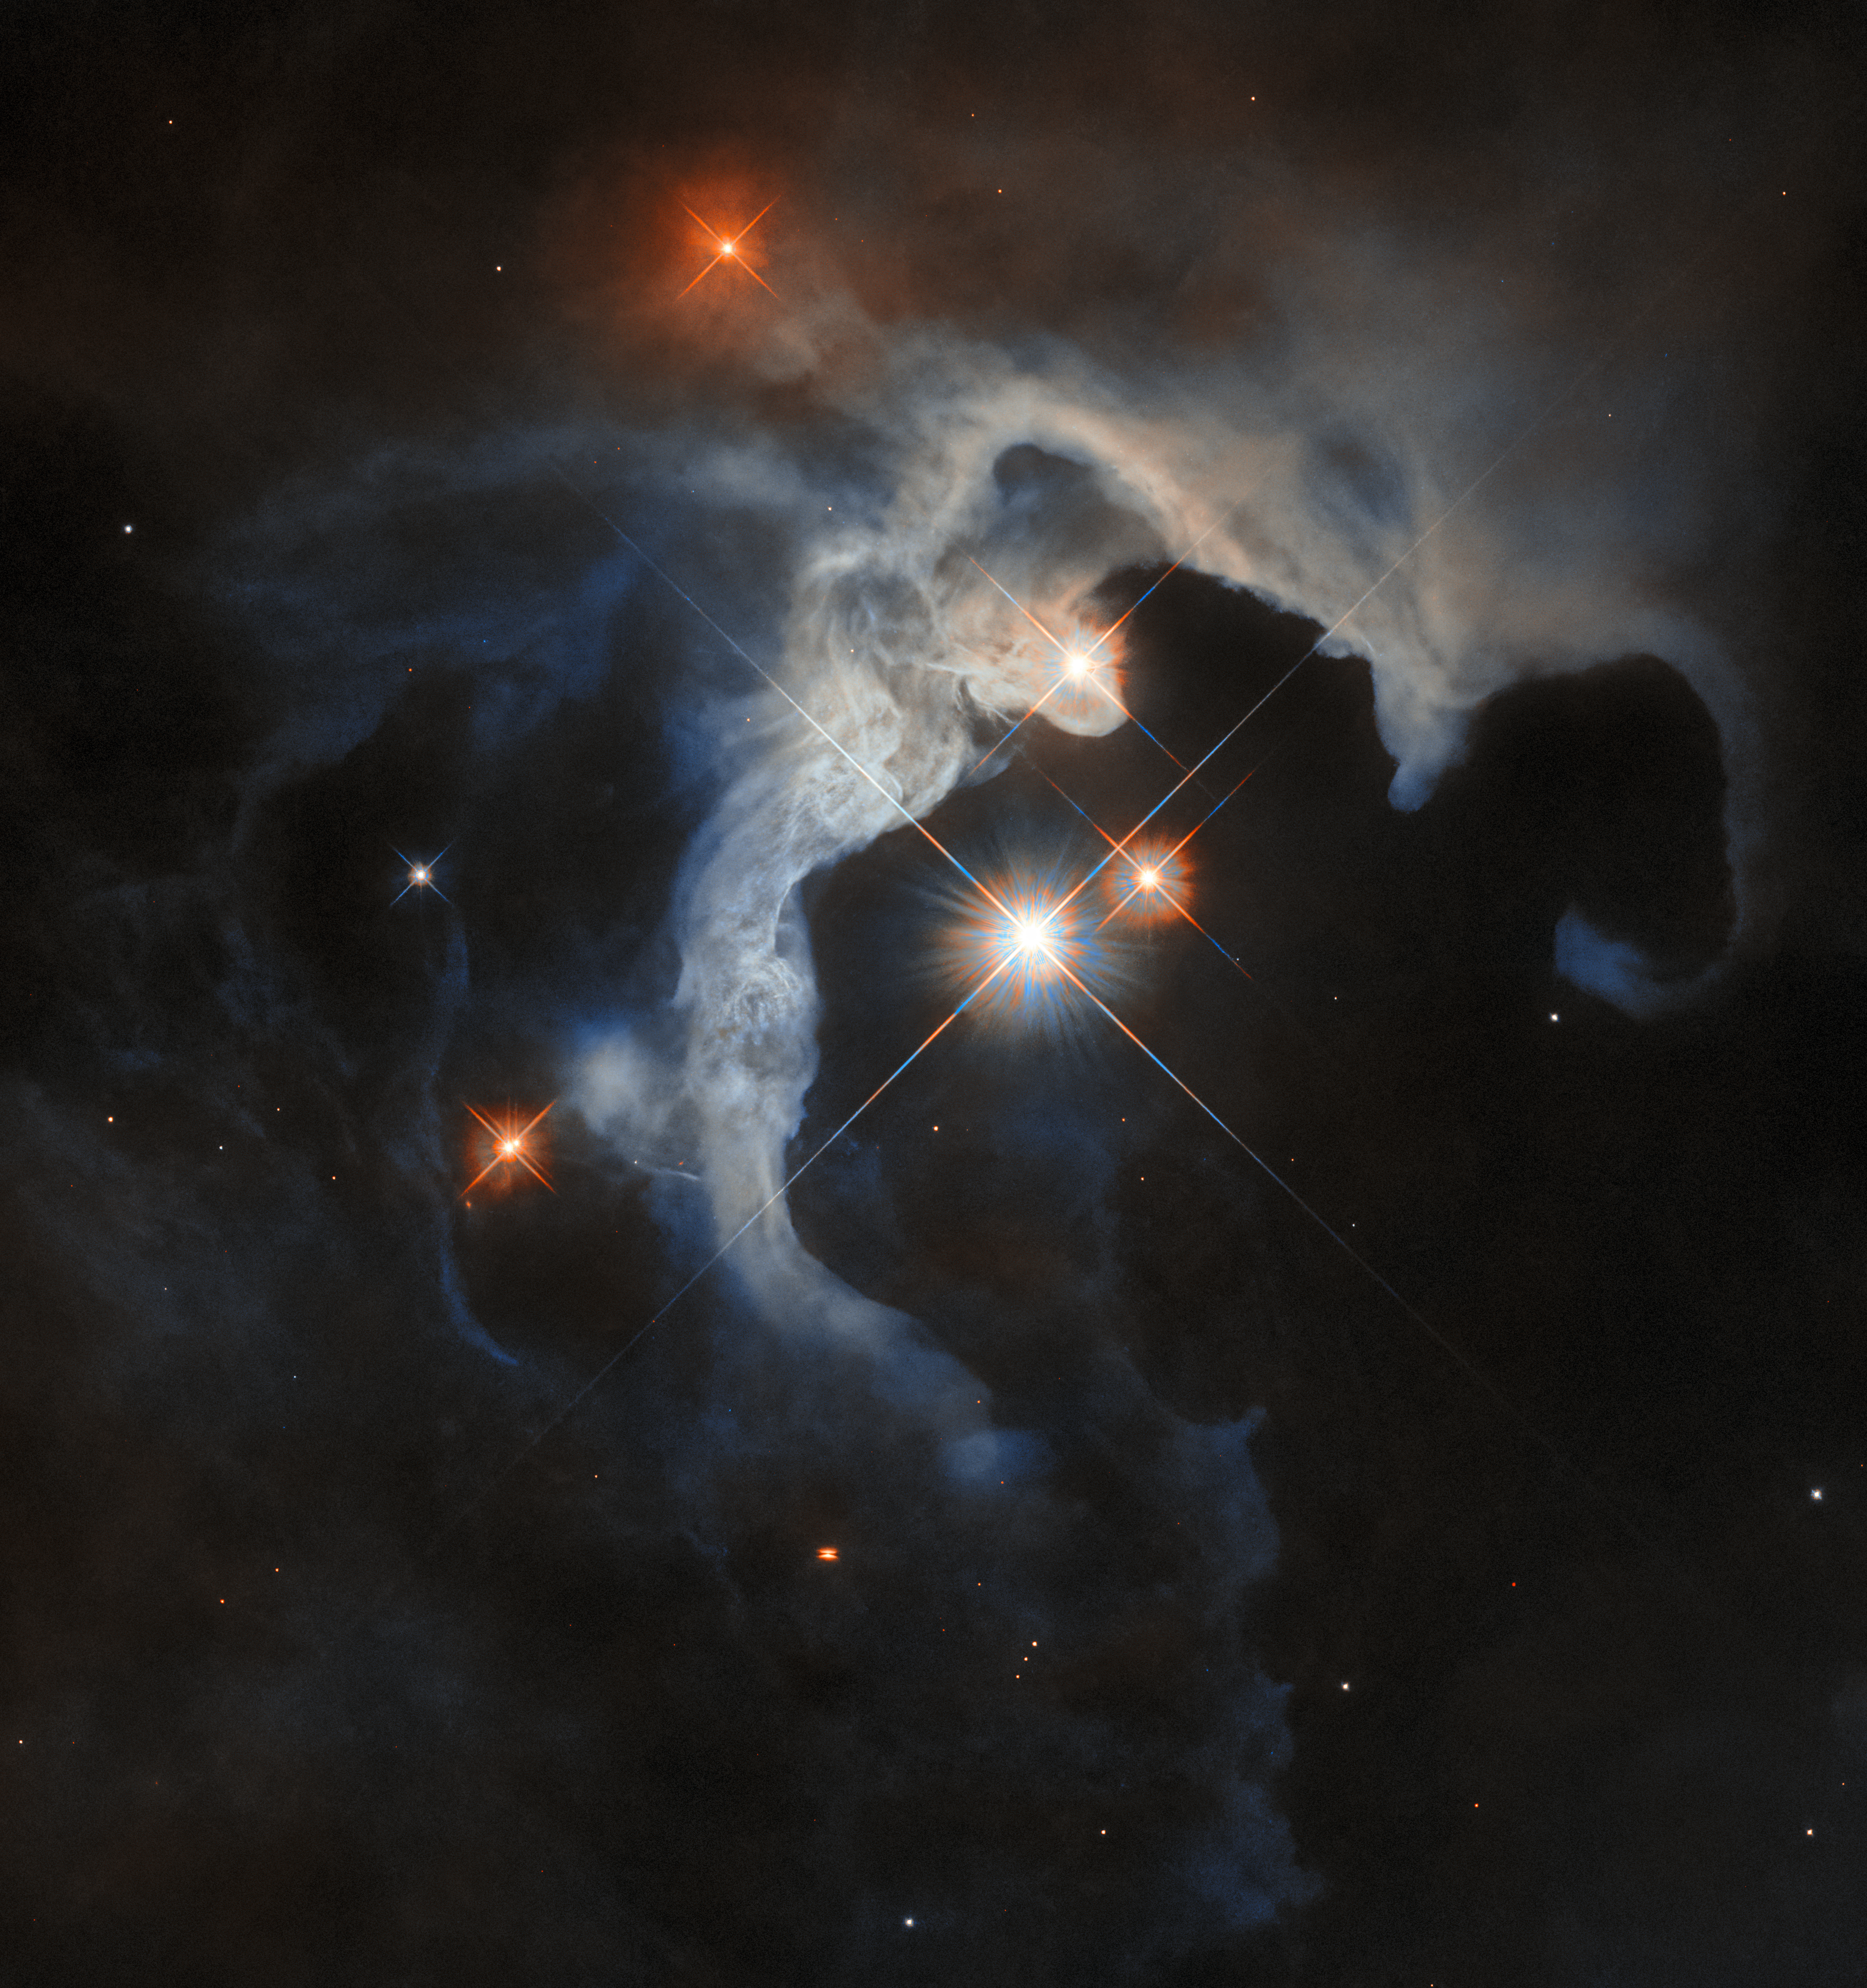

The young stars of Taurus

The subject of this week's Hubble Picture of the Week is a reflection nebula, identified as GN 04.32.8. Reflection nebulae are clouds of dust in space that don't emit their own light, as other nebulae do. Instead, the light from nearby stars hits and scatters off their dust, lighting them up. Because of the way the light scatters, many reflection nebulae tend to appear blue, GN 04.32.8 included.

GN 04.32.8 is a small part of the stellar nursery known as the Taurus Molecular Cloud. At only roughly 480 light-years from Earth in the constellation Taurus, it's one of the best locations for studying newly forming stars. This reflection nebula is illuminated by the system of three bright stars in the centre of this image, mainly the variable star V1025 Tauri in the very centre. One of those stars overlaps with part of the nebula: this is another variable star that is named HP Tauri, but is classified as a T Tauri star, for its similarity to yet another variable star elsewhere in the Taurus Molecular Complex. T Tauri stars are very active, chaotic stars at an early stage of their evolution, so it's no surprise that they appear in a prolific stellar nursery like this one! The three stars are also named HP Tau, HP Tau G2 and HP Tau G3; they’re believed to be gravitationally bound to each other, forming a triple system.

Eagle-eyed viewers might notice the small, squashed, orange spot, just left of centre below the clouds of the nebula, that’s crossed by a dark line. This is a newly-formed protostar, hidden in a protoplanetary disc that obstructs some of its light. Because the disc is edge-on to us, it’s an ideal candidate for study. Astronomers are using Hubble here to examine it closely, seeking to learn about the kinds of exoplanets that might be formed in discs like it.

Credit: ESA/Hubble & NASA, G. Duchêne